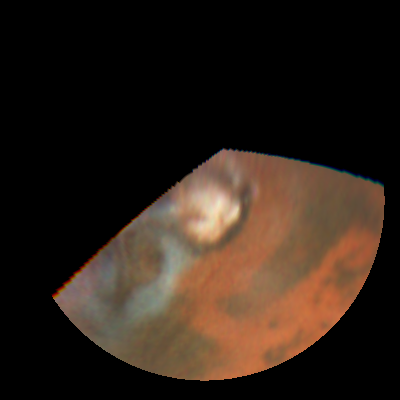

Rapid weather change observed on Mars

NASA/ESA Hubble Space Telescope images of Mars obtained on July 10, 1997.

Credit: Steve Lee (Univ. Colorado), Phil James (Univ. Toledo), and Todd Clancy (Space Science Inst.)